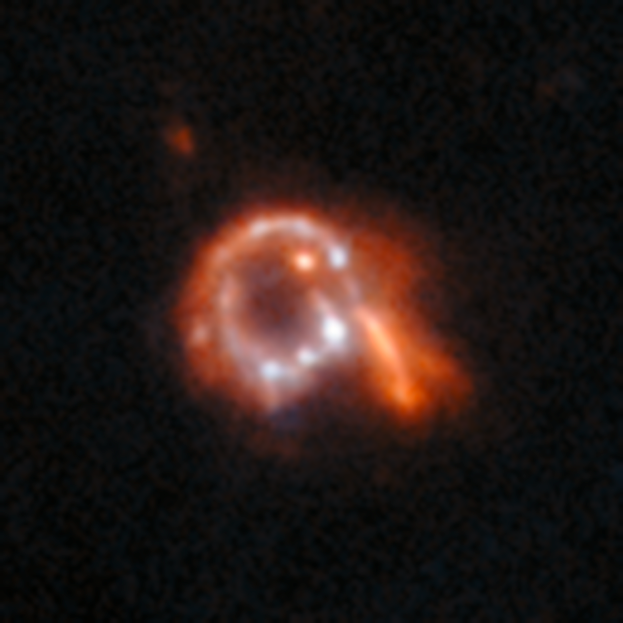

An anomaly from Hubble’s archive — Collisional ring galaxy

This is a previously-undiscovered astrophysical anomaly, found in the Hubble Space Telescope’s archive by researchers using a new AI-assisted method. The AI tool allowed them to sift through nearly 100 million image cutouts in just days, turning up rare and anomalous objects like this one.

This object was classified by the research team as a “collisional ring” galaxy — one of only two that were found. These are galaxies which are partly or wholly ring-shaped, but with a disrupted or bent disc that is noticeably luminous. These ring formations arise when a galaxy collides with another by crashing right through its centre, creating a roiling, circular wave of star formation. Hubble has featured other collisional ring galaxies before, but the precise alignment between colliding galaxies needed to create them means they are quite rare, including in AI-assisted searches. This galaxy was not previously recorded.

Read more about this new research here.

Credit: ESA/Hubble & NASA, D. O’Ryan, P. Gómez (European Space Agency), M. Zamani (ESA/Hubble)